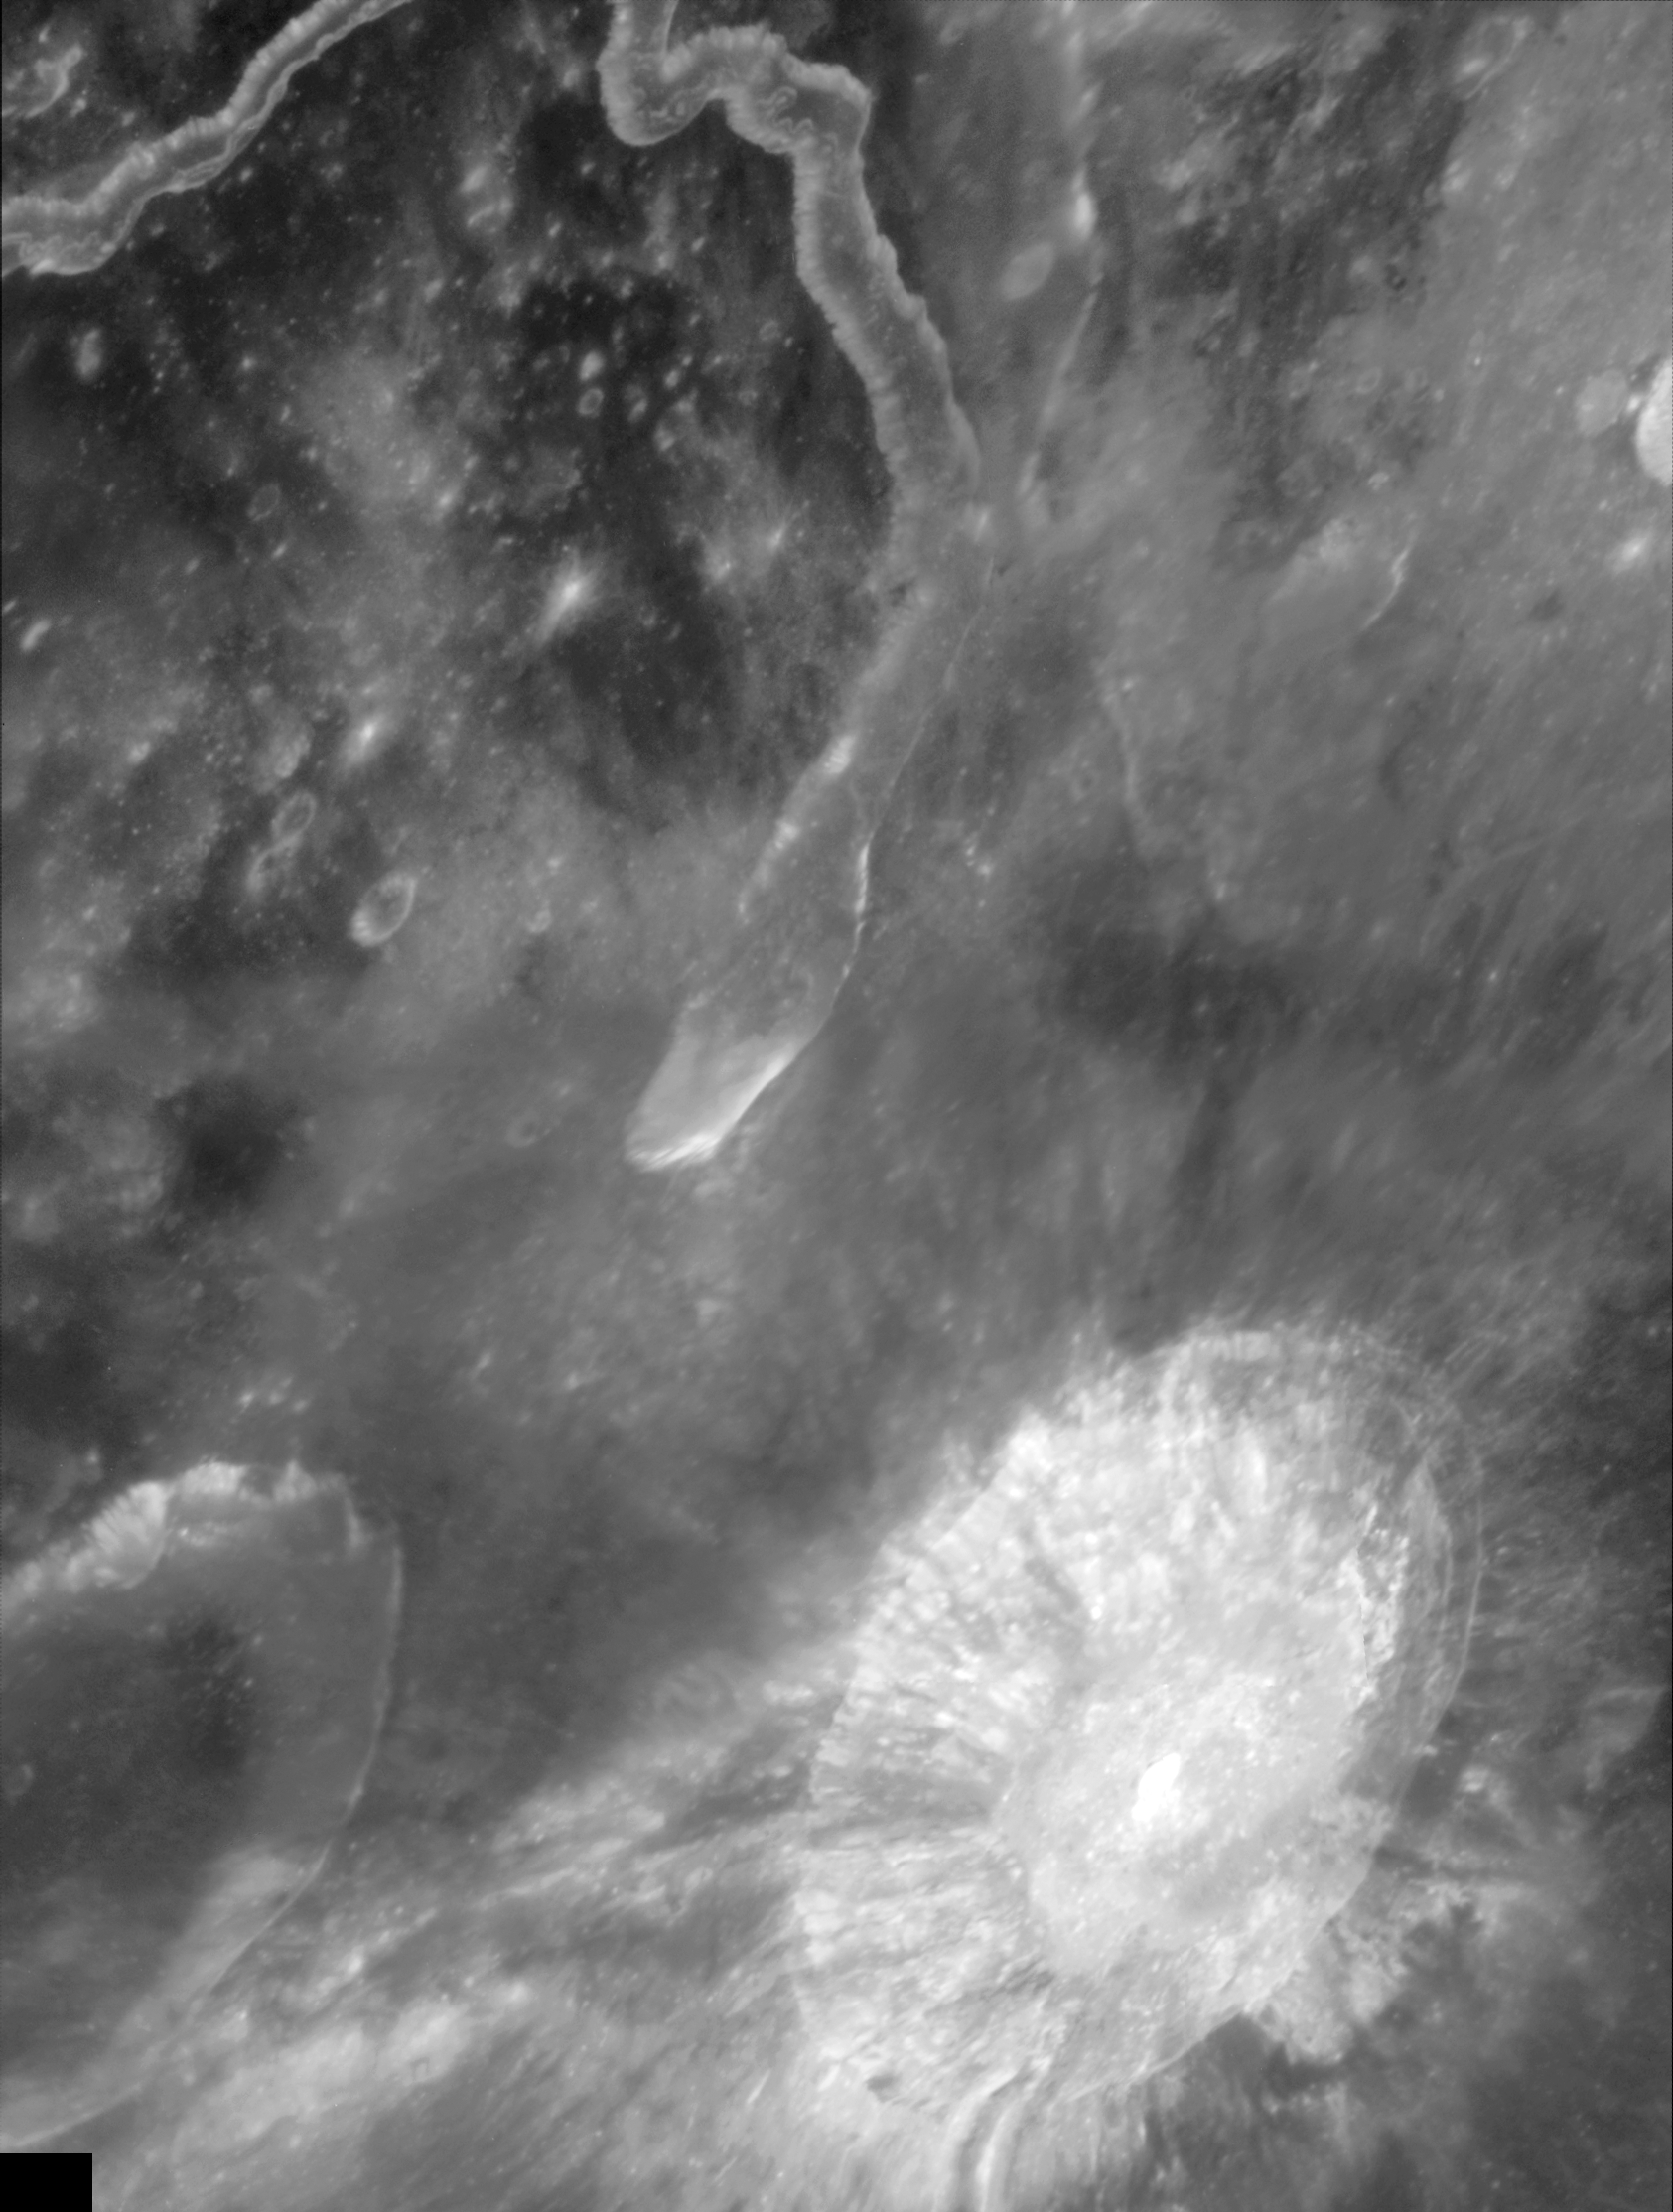

Aristarchus Plateau in Ultraviolet Light

The Hubble Space Telescope Advanced Camera for Surveys imaged Aristarchus crater and nearby Schroter's Valley rille on Aug. 21, 2005. The Hubble images reveal fine-scale details of the crater's interior and exterior in ultraviolet and visible wavelengths at a scale of approximately 50 to 100 metres per picture element.

Credit: NASA, ESA and J. Garvin (NASA/GSFC)